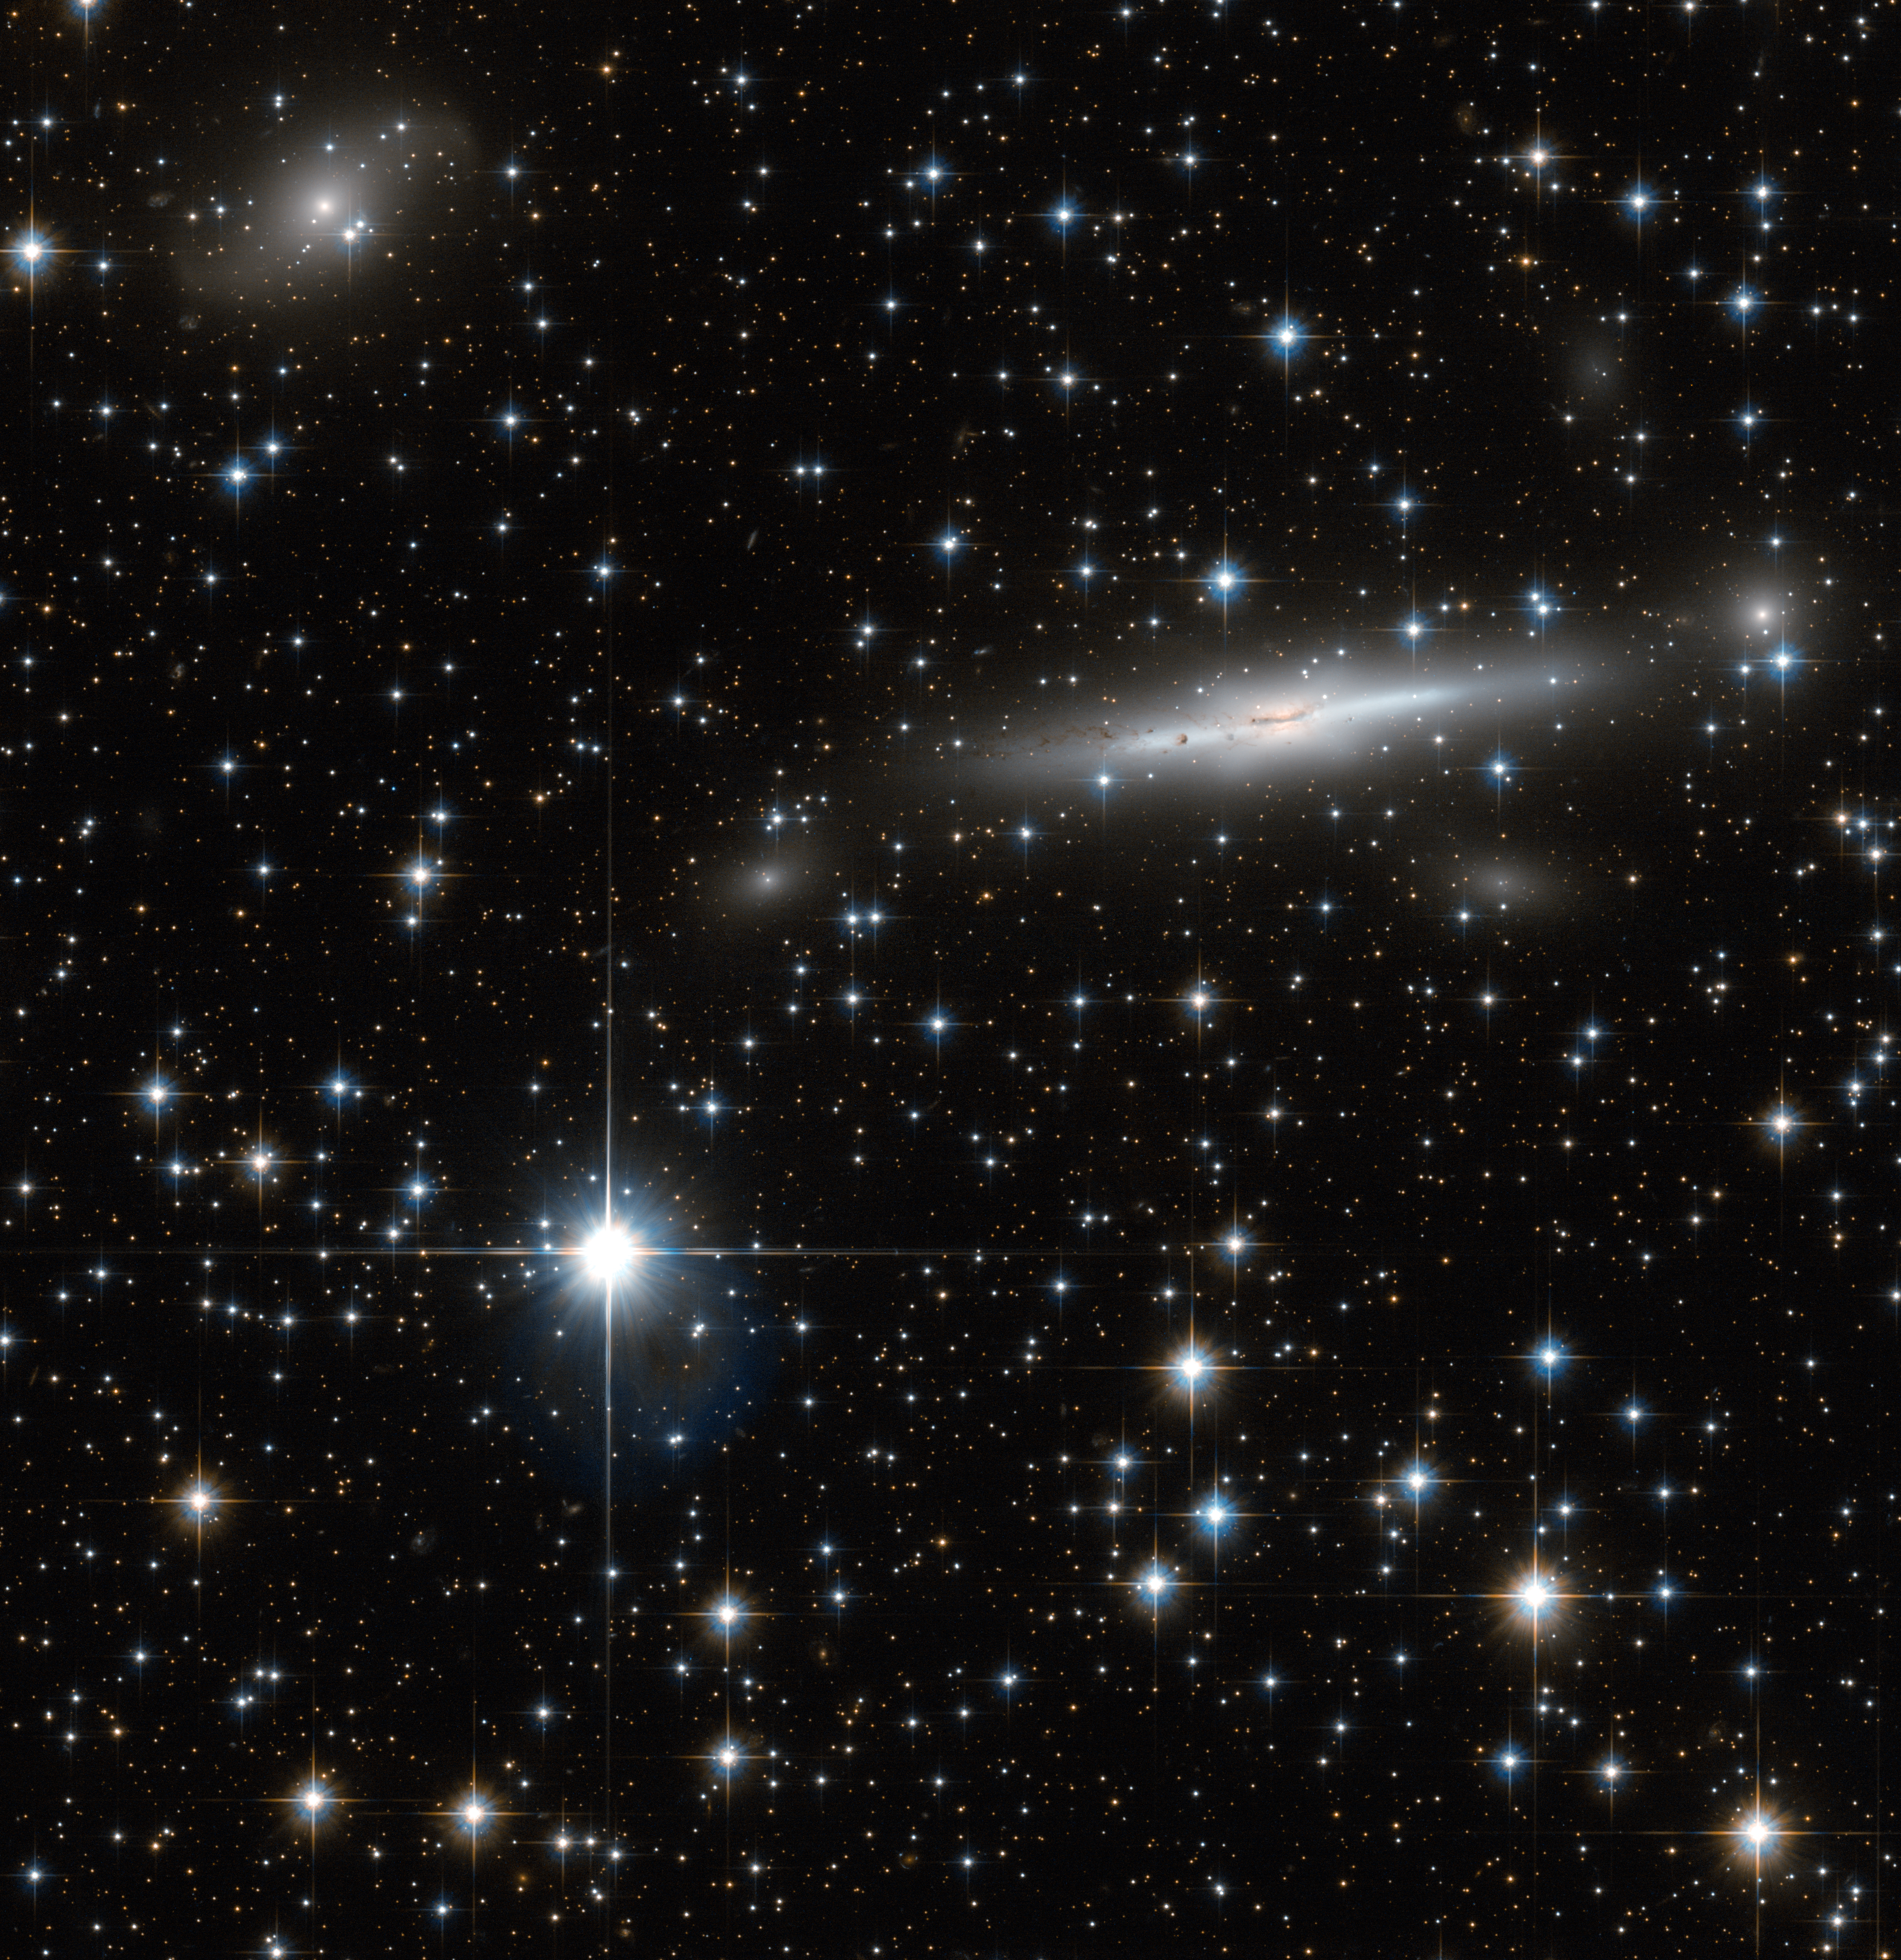

A busy patch of the Great Attractor

A busy patch of space has been captured in this image from the NASA/ESA Hubble Space Telescope. Scattered with many nearby stars, the field also has numerous galaxies in the background.

Located on the border of Triangulum Australe (The Southern Triangle) and Norma (The Carpenter’s Square), this field covers part of the Norma Cluster (Abell 3627) as well as a dense area of our own galaxy, the Milky Way.

The Norma Cluster is the closest massive galaxy cluster to the Milky Way, and lies about 220 million light-years away. The enormous mass concentrated here, and the consequent gravitational attraction, mean that this region of space is known to astronomers as the Great Attractor, and it dominates our region of the Universe.

The largest galaxy visible in this image is ESO 137-002, a spiral galaxy seen edge on. In this image from Hubble, we see large regions of dust across the galaxy’s bulge. What we do not see here is the tail of glowing X-rays that has been observed extending out of the galaxy — but which is invisible to an optical telescope like Hubble.

Observing the Great Attractor is difficult at optical wavelengths. The plane of the Milky Way — responsible for the numerous bright stars in this image — both outshines (with stars) and obscures (with dust) many of the objects behind it. There are some tricks for seeing through this — infrared or radio observations, for instance — but the region behind the centre of the Milky Way, where the dust is thickest, remains an almost complete mystery to astronomers.

This image consists of exposures in blue and infrared light taken by Hubble’s Advanced Camera for Surveys.

Credit: ESA/Hubble & NASA